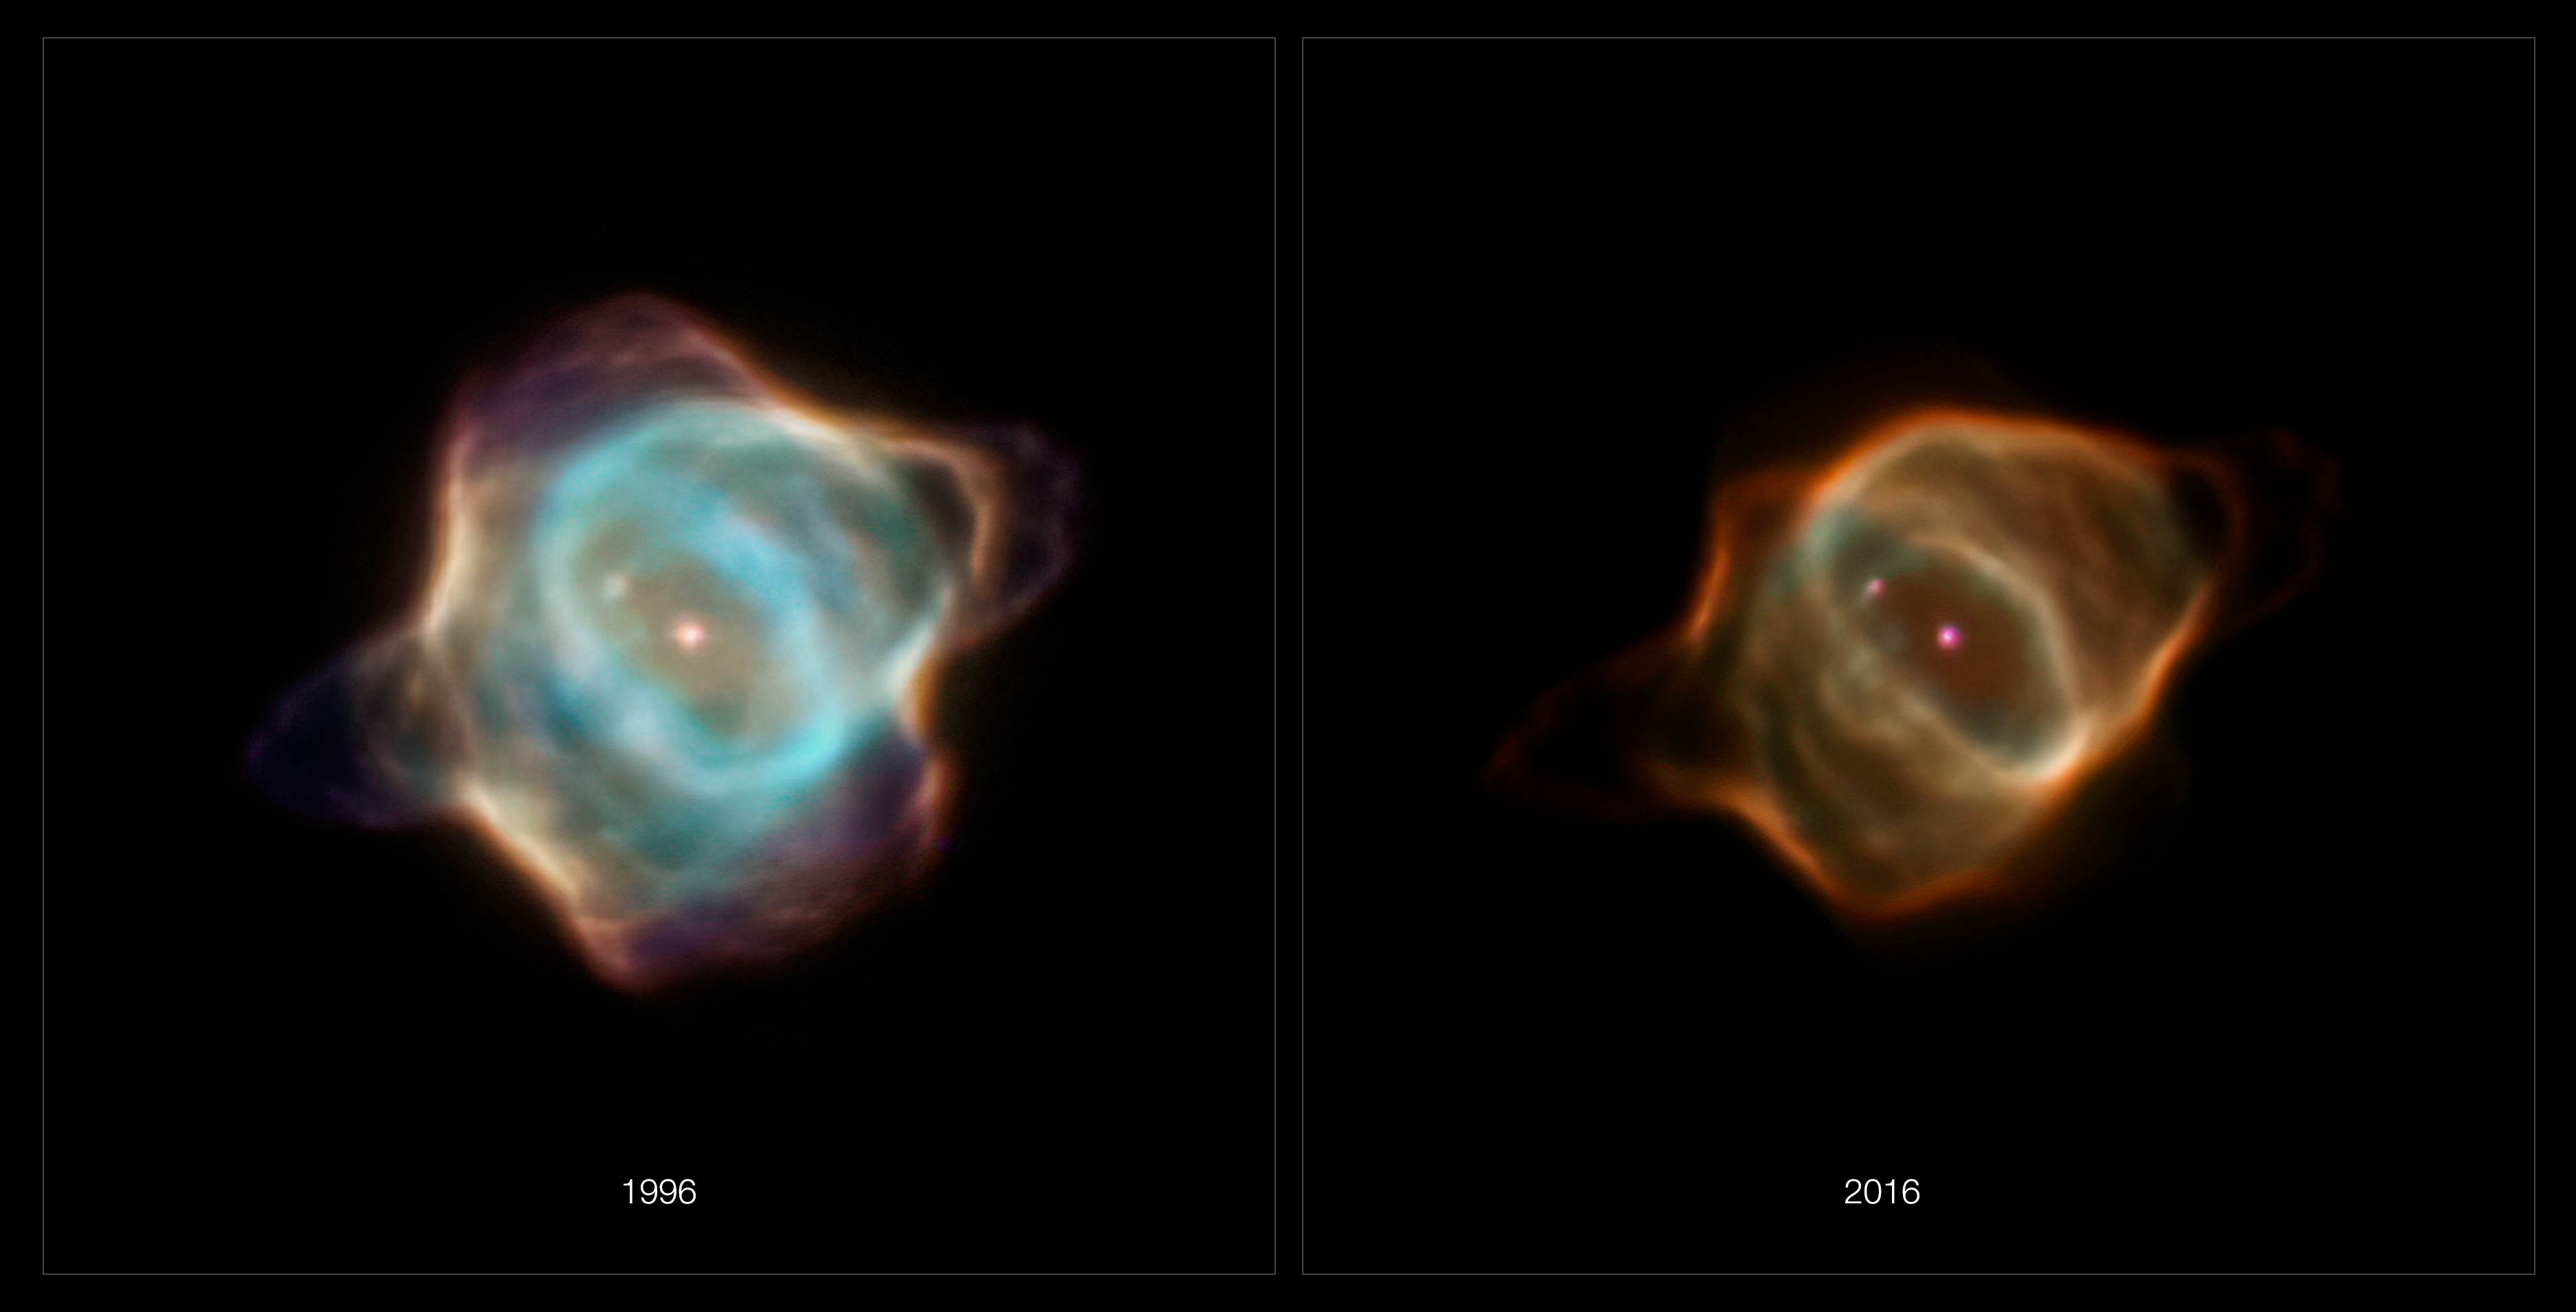

Hubble Captures Fading of the Stingray Nebula

Archival data from the NASA/ESA Hubble Space Telescope reveal that the nebula Hen 3-1357, nicknamed the Stingray nebula, has faded precipitously over just the past two decades. Witnessing such a swift rate of change in a planetary nebula is exceedingly rare, say researchers.

These images captured by Hubble in 1996 (left), when compared to Hubble images taken in 2016 (right), show a nebula that has drastically dimmed in brightness and changed shape. Bright blue shells of gas near the centre of the nebula have all but disappeared, and the wavy edges that earned this nebula its aquatic-themed name are virtually gone. The young nebula no longer pops against the black velvet background of the distant Universe.

Credit: NASA, ESA, B. Balick (University of Washington), M. Guerrero (Instituto de Astrofísica de Andalucía), and G. Ramos-Larios (Universidad de Guadalajara)